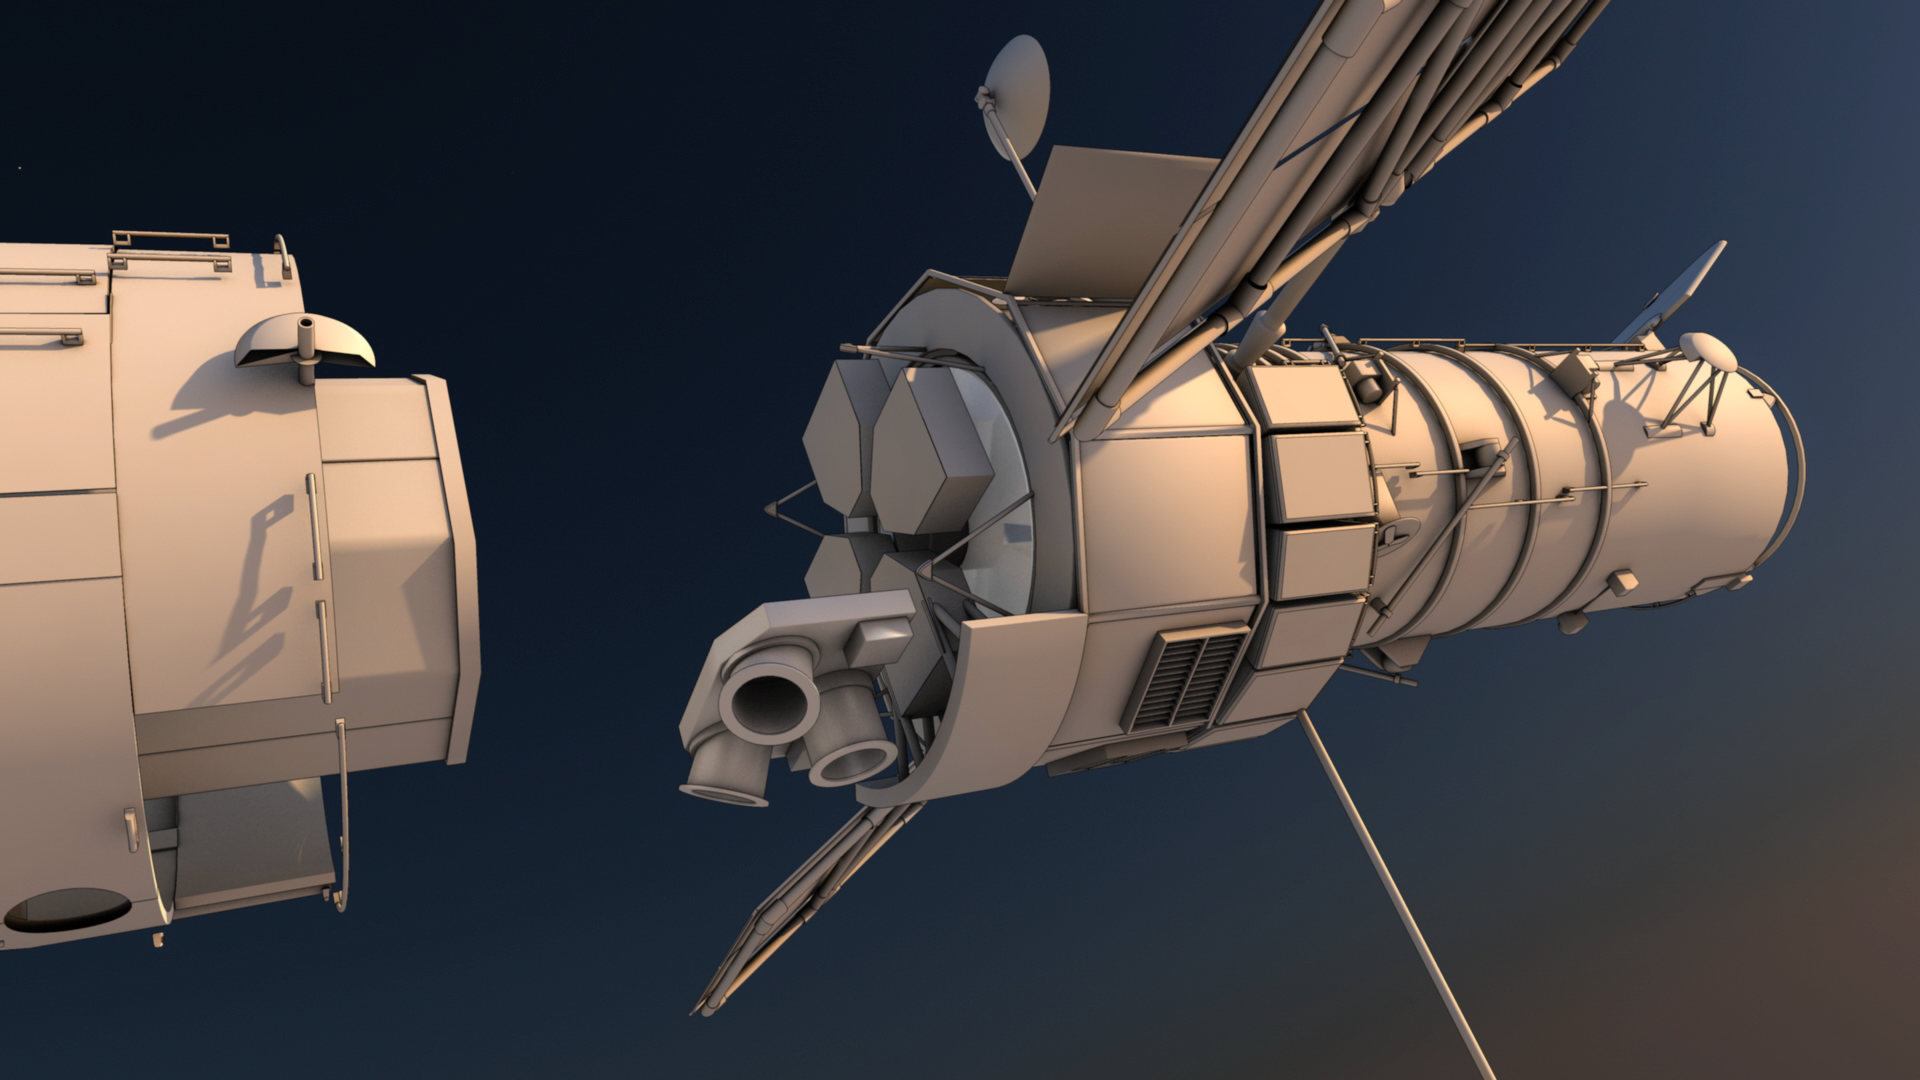

Screenshot of Hubblecast 114

Screenshot of Hubblecast 114: How does Hubble orientate itself in space?

Credit: NASA & ESA